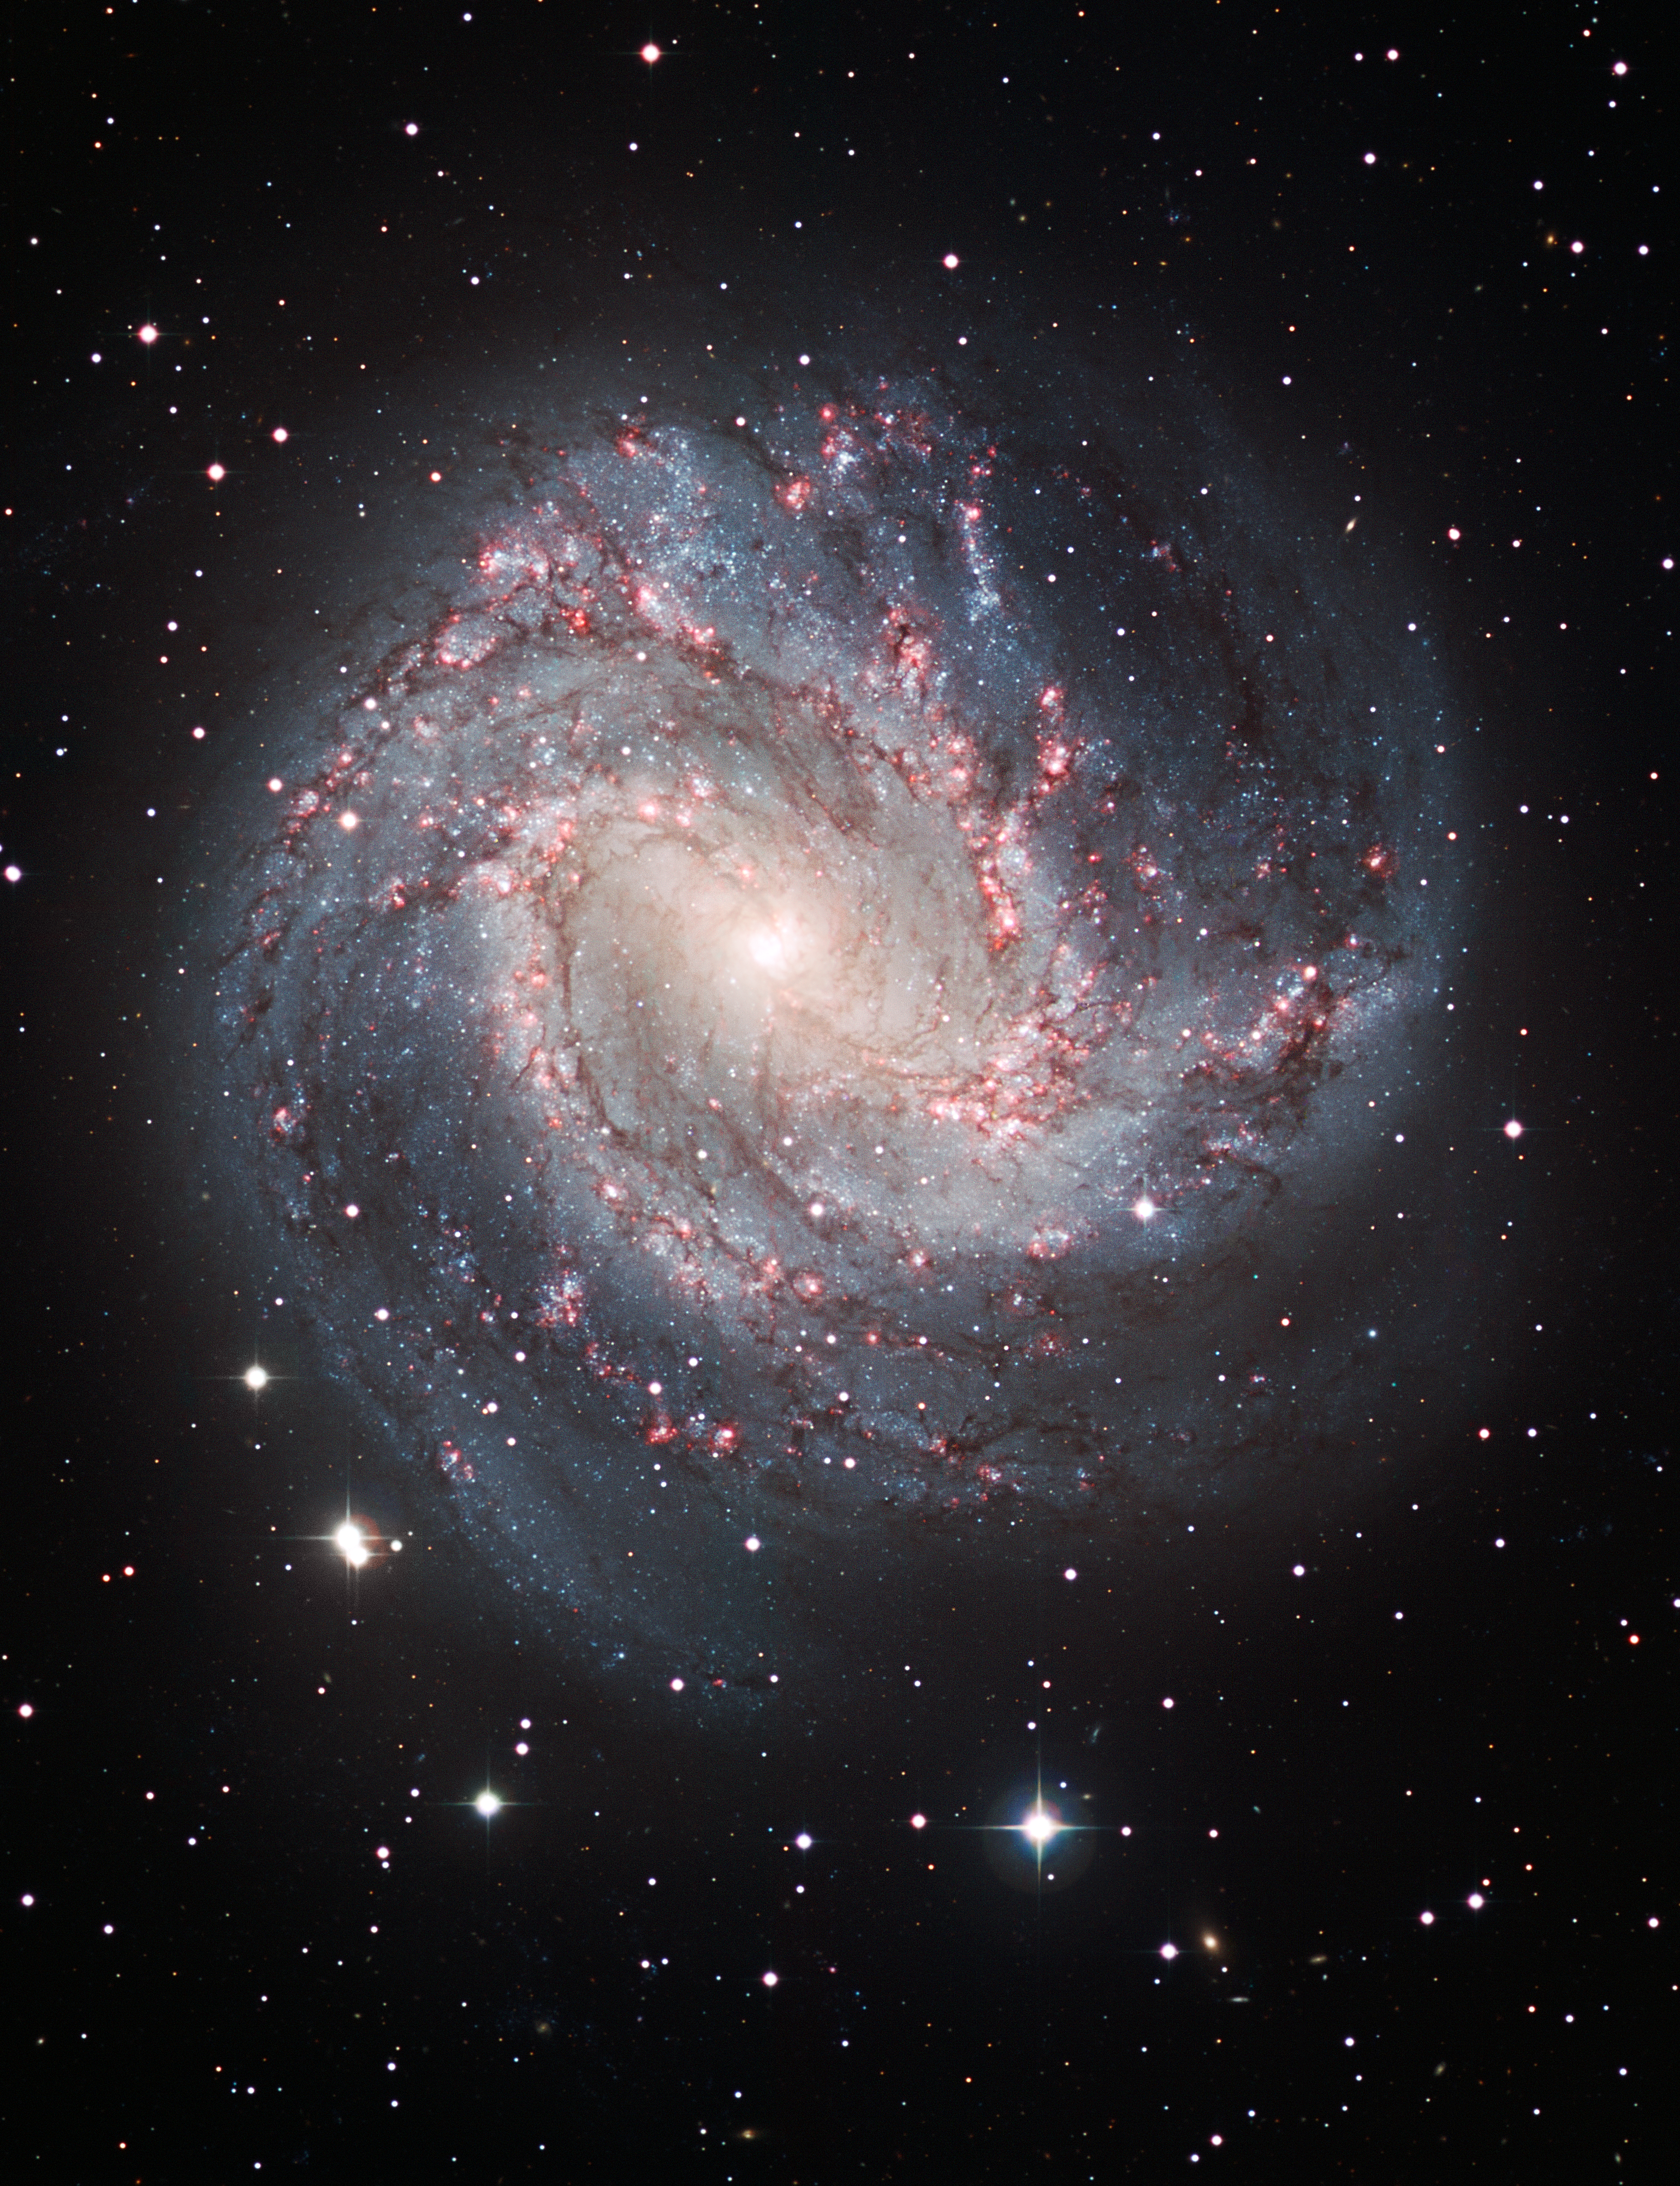

Ground-based image of M83 Taken at ESO in La Silla, Chile

This is an image of the galaxy M83, taken by the European Southern Observatory's Wide Field Imager on the ESO/MPG 2.2-metre telescope at La Silla, Chile.

Credit: ESO